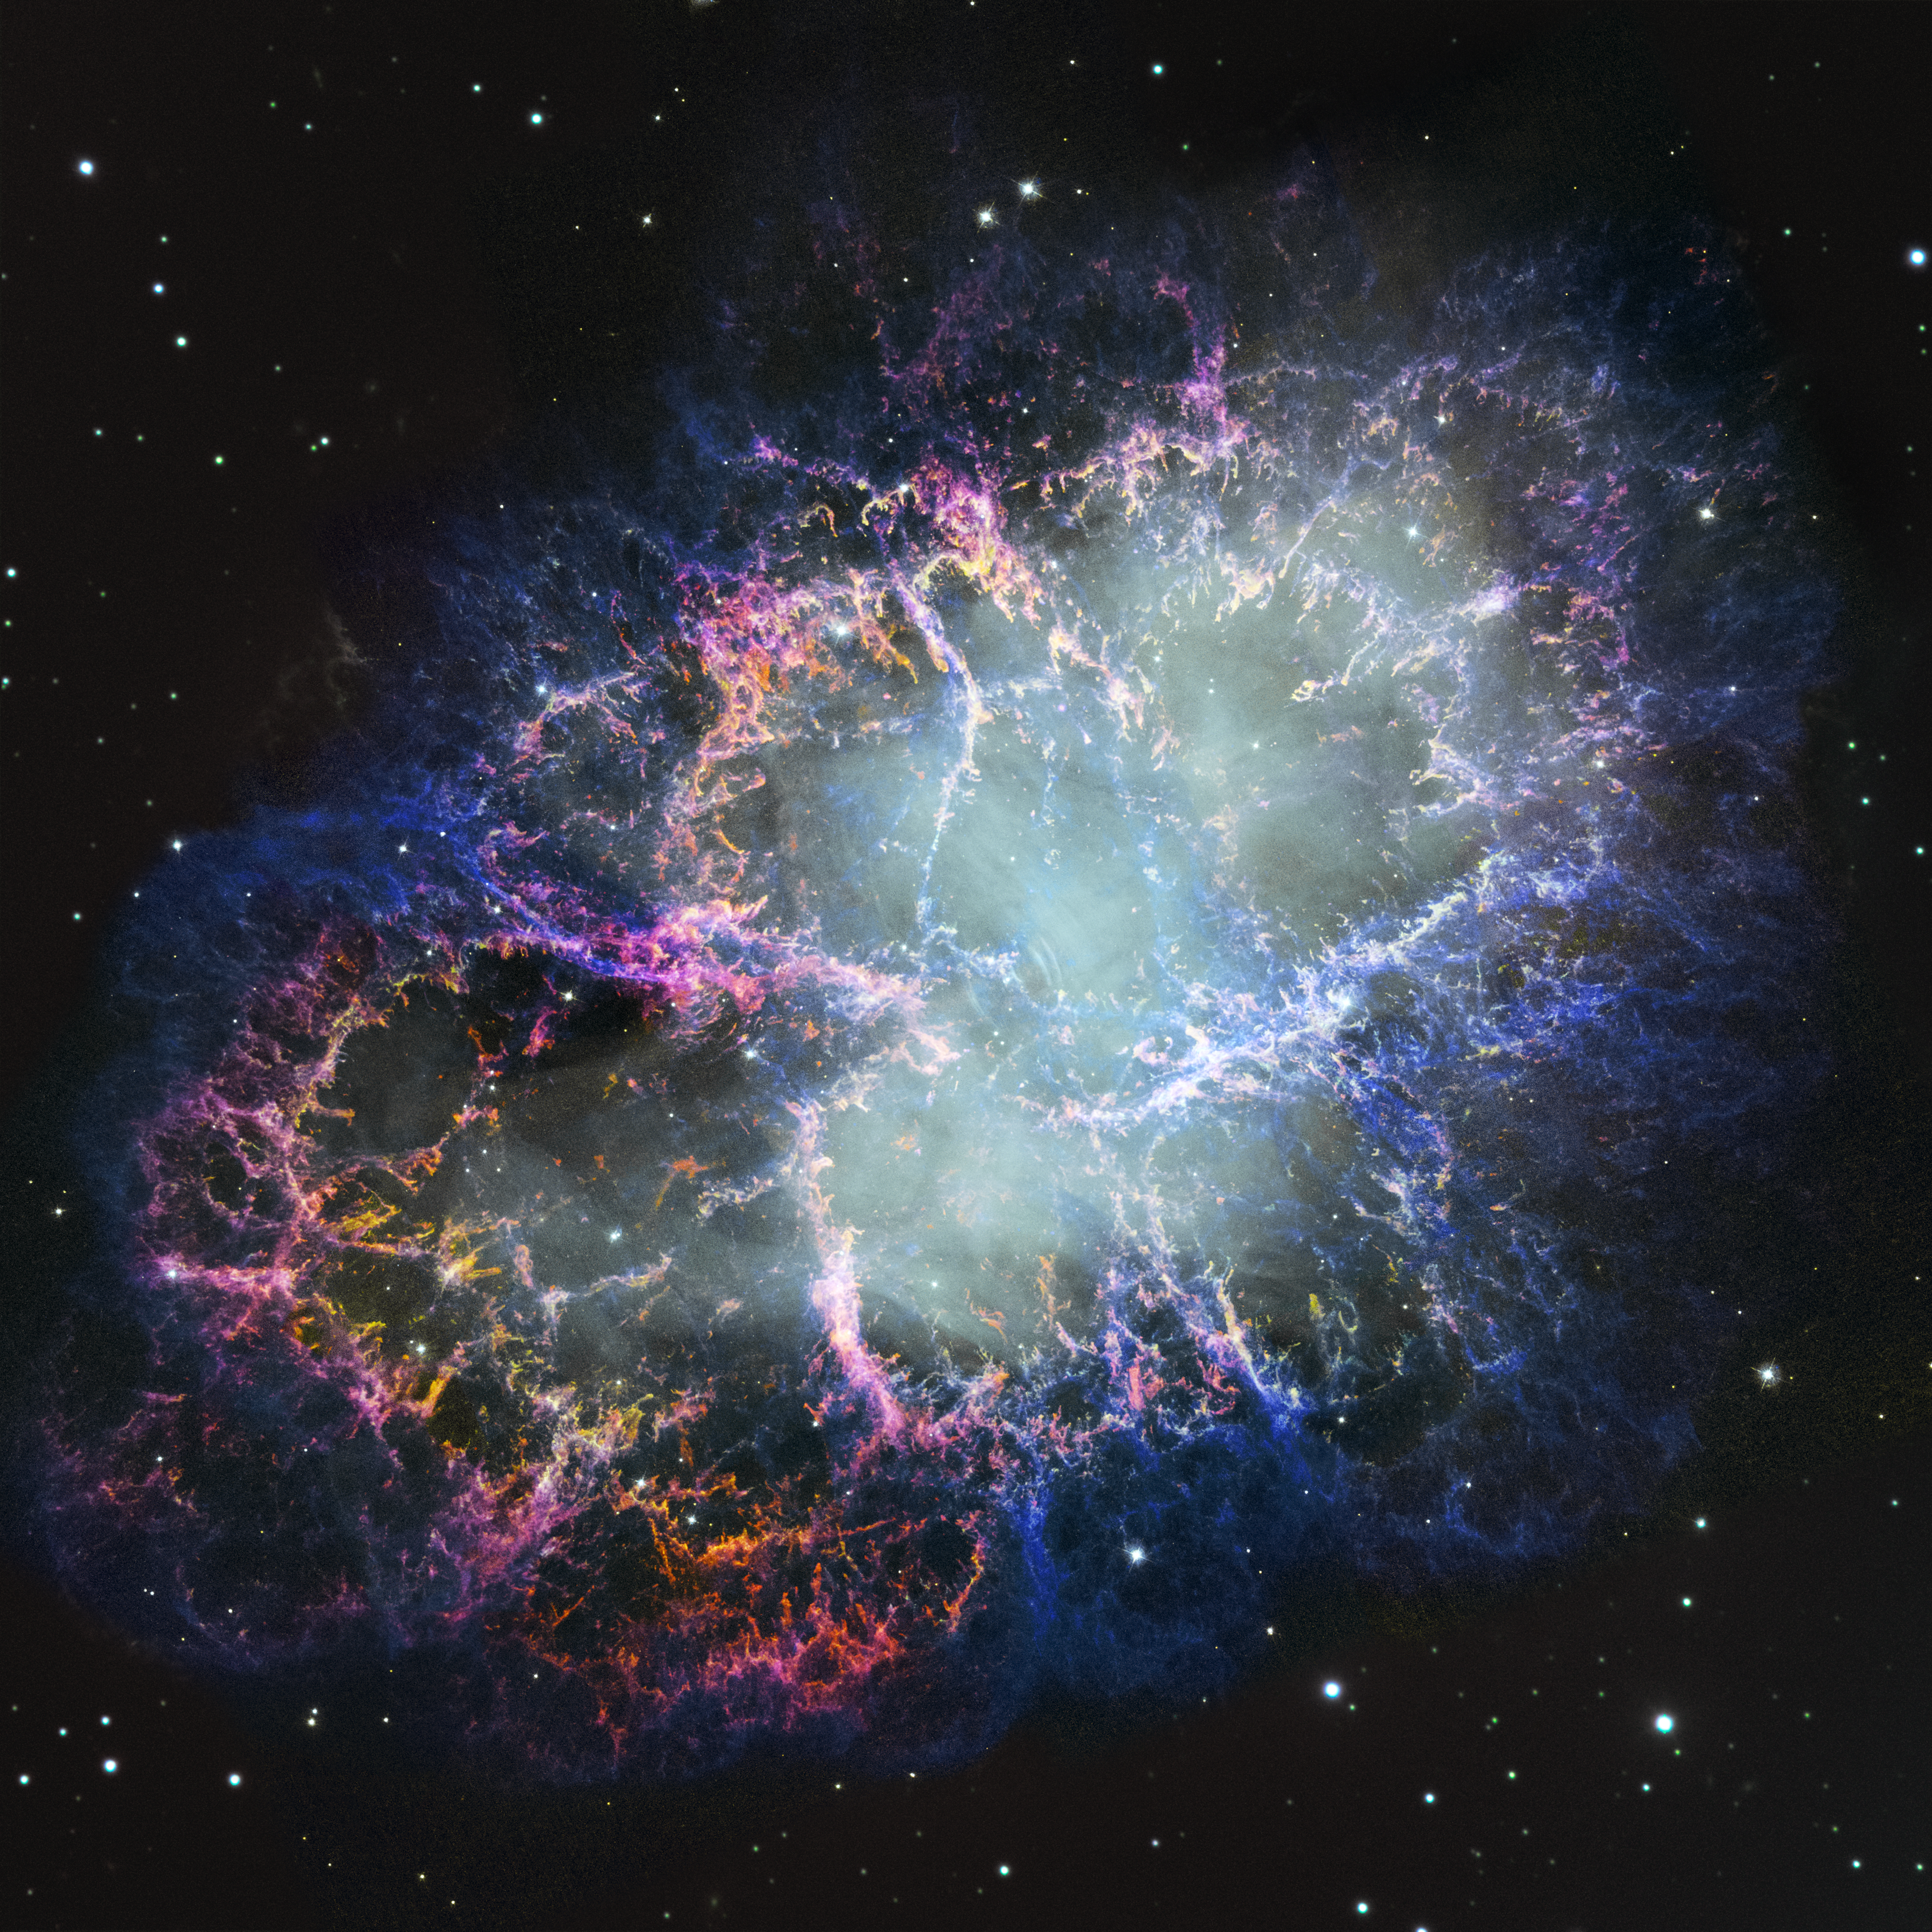

Crab Nebula (new image from 1999/2000 data)

This newly processed image comes from data originally captured by the NASA/ESA Hubble Space Telescope in 1999 and 2000. Updated image-processing technology allows for this archival image to be best compared with more recent data, including those captured by Hubble itself. Hubble received a new imaging instrument in 2009, the Wide Field Camera 3.

Credit: NASA, ESA, STScI, W. Blair (JHU). Image Processing: J. DePasquale (STScI)